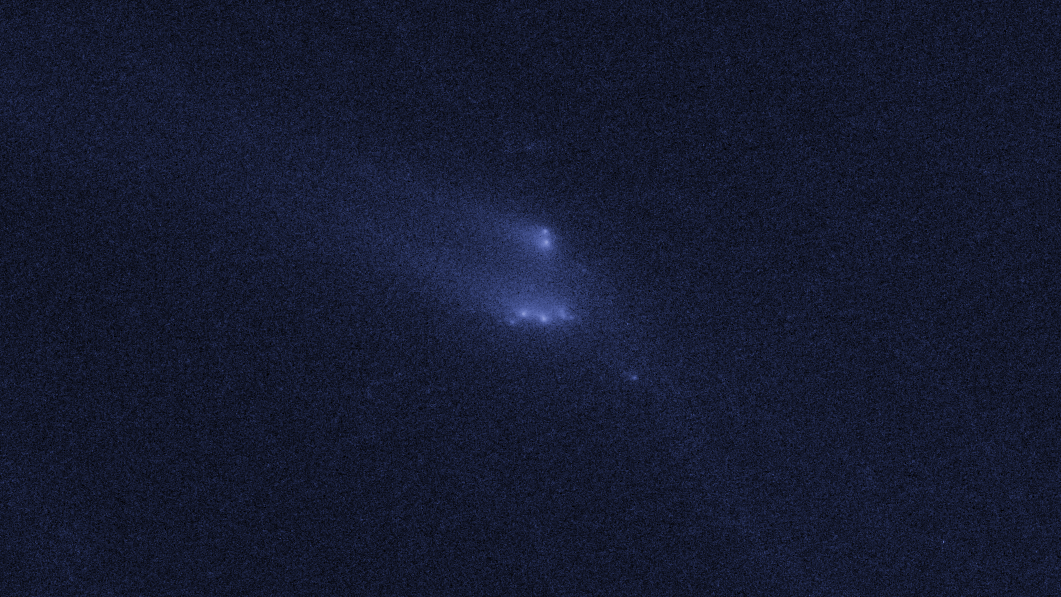

Disintegrating asteroid P/2013 R3 as viewed by Hubble on 13 December 2013

This image shows NASA/ESA Hubble Space Telescope observations of asteroid P/2013 R3. This asteroid has been found to be disintegrating and breaking apart — the first such body ever seen to do this.

This image shows P/2013 R3 as it was seen on 13 December 2013.

Credit: NASA, ESA, D. Jewitt (UCLA)